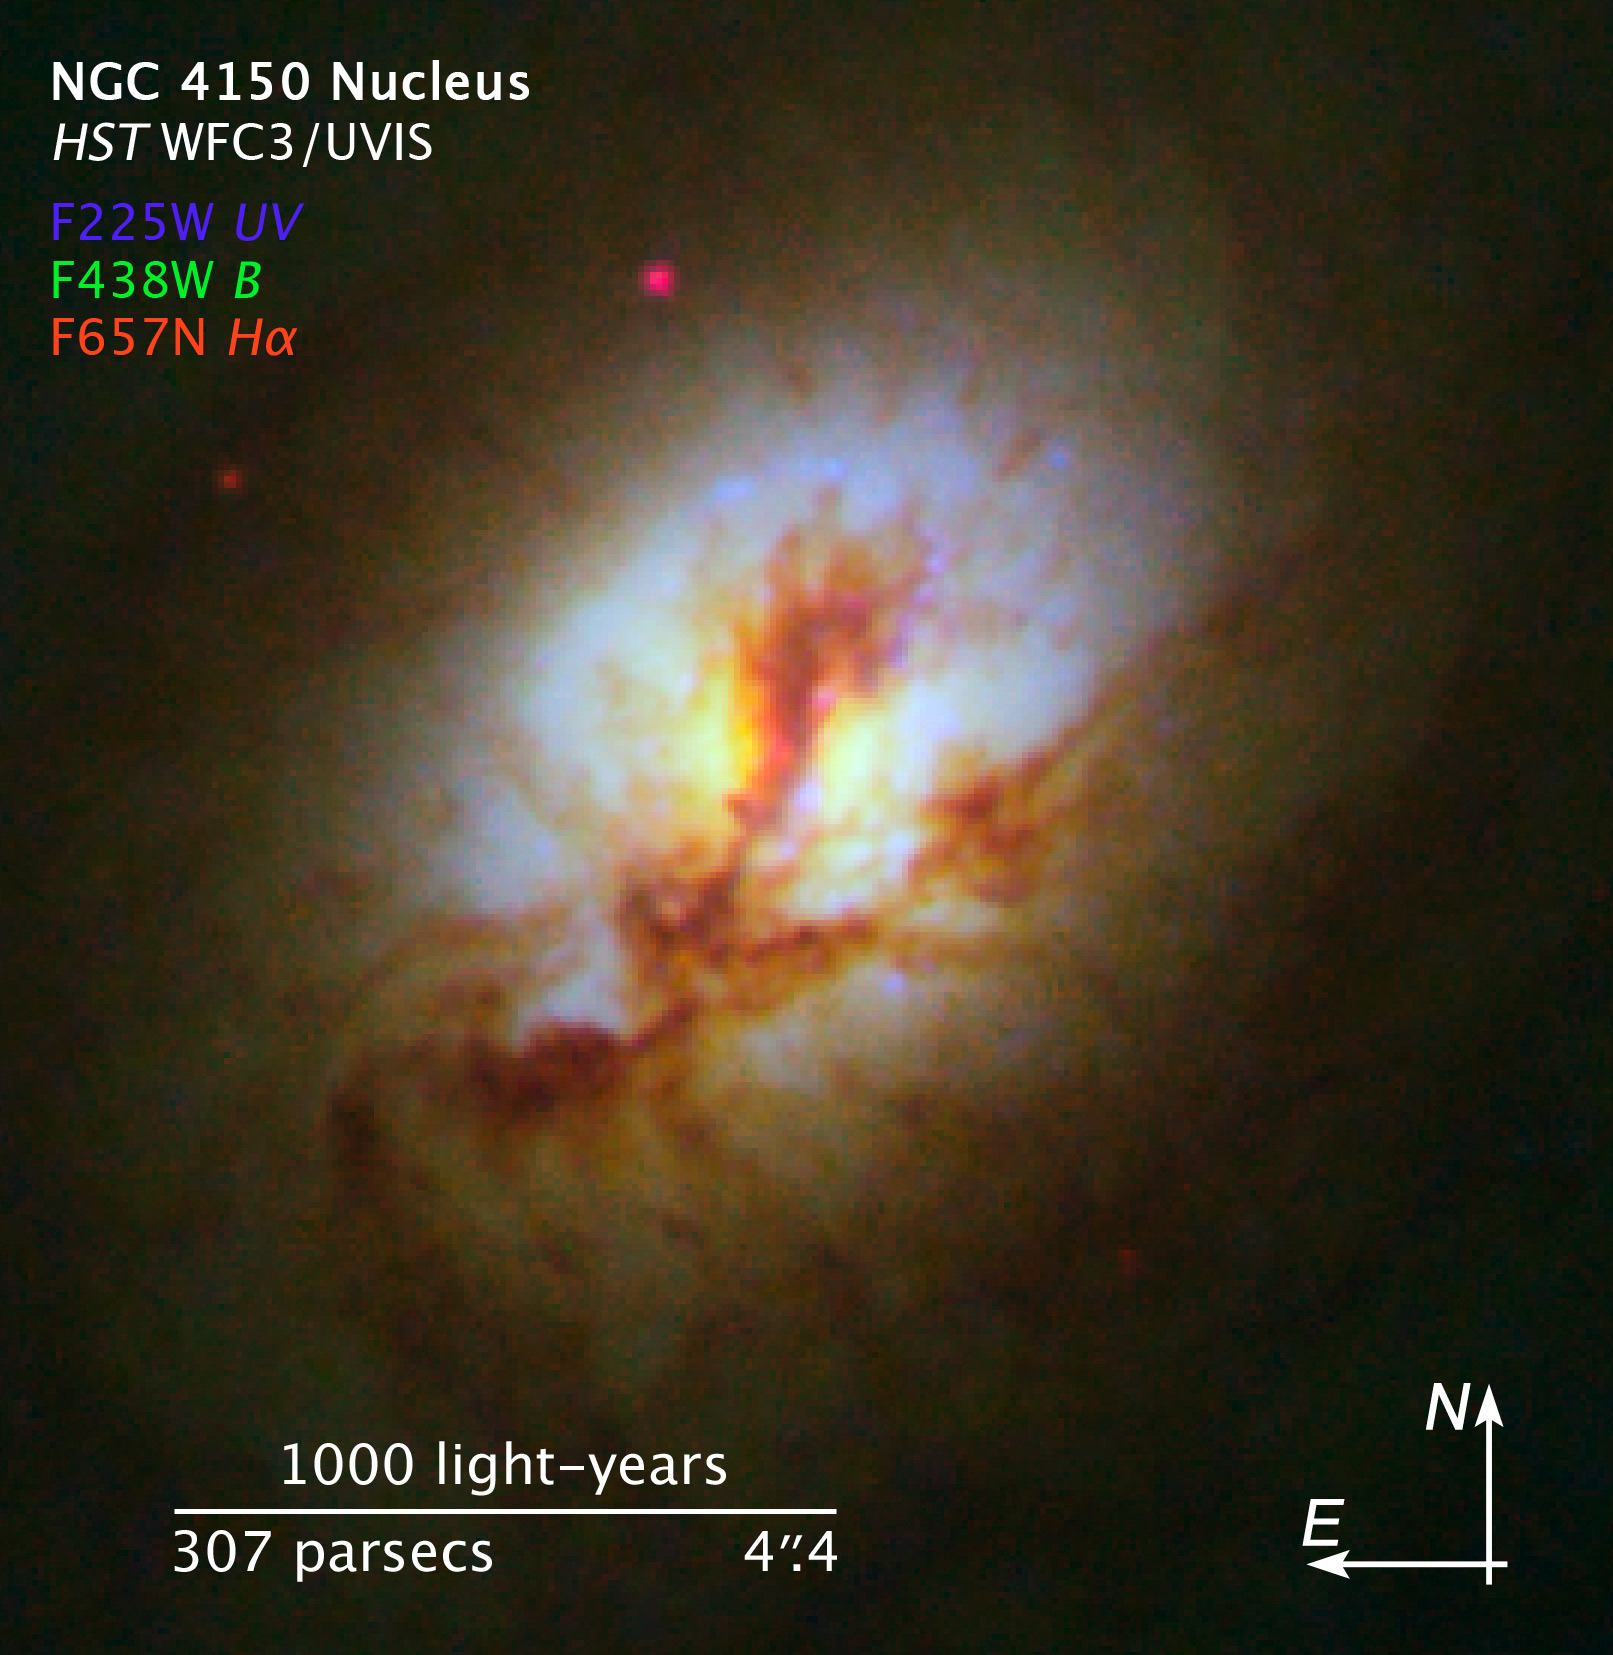

Compass and scale image for NGC 4150

Compass and scale image for NGC 4150.

Credit: NASA, ESA, R.M. Crockett (University of Oxford, U.K.), S. Kaviraj (Imperial College London and University of Oxford, U.K.), J. Silk (University of Oxford), M. Mutchler (Space Telescope Science Institute, Baltimore, USA), R. O'Connell (University of Virginia, Charlottesville, USA), and the WFC3 Scientific Oversight Committee